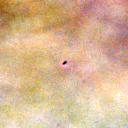

090-326

One of 42 new proplyds discovered in the Orion Nebula, 090-326 is one of the dark proplyds that lies relatively far from the nebula’s brightest star, Theta 1 Orionis C.

Credit: NASA/ESA and L. Ricci (ESO)